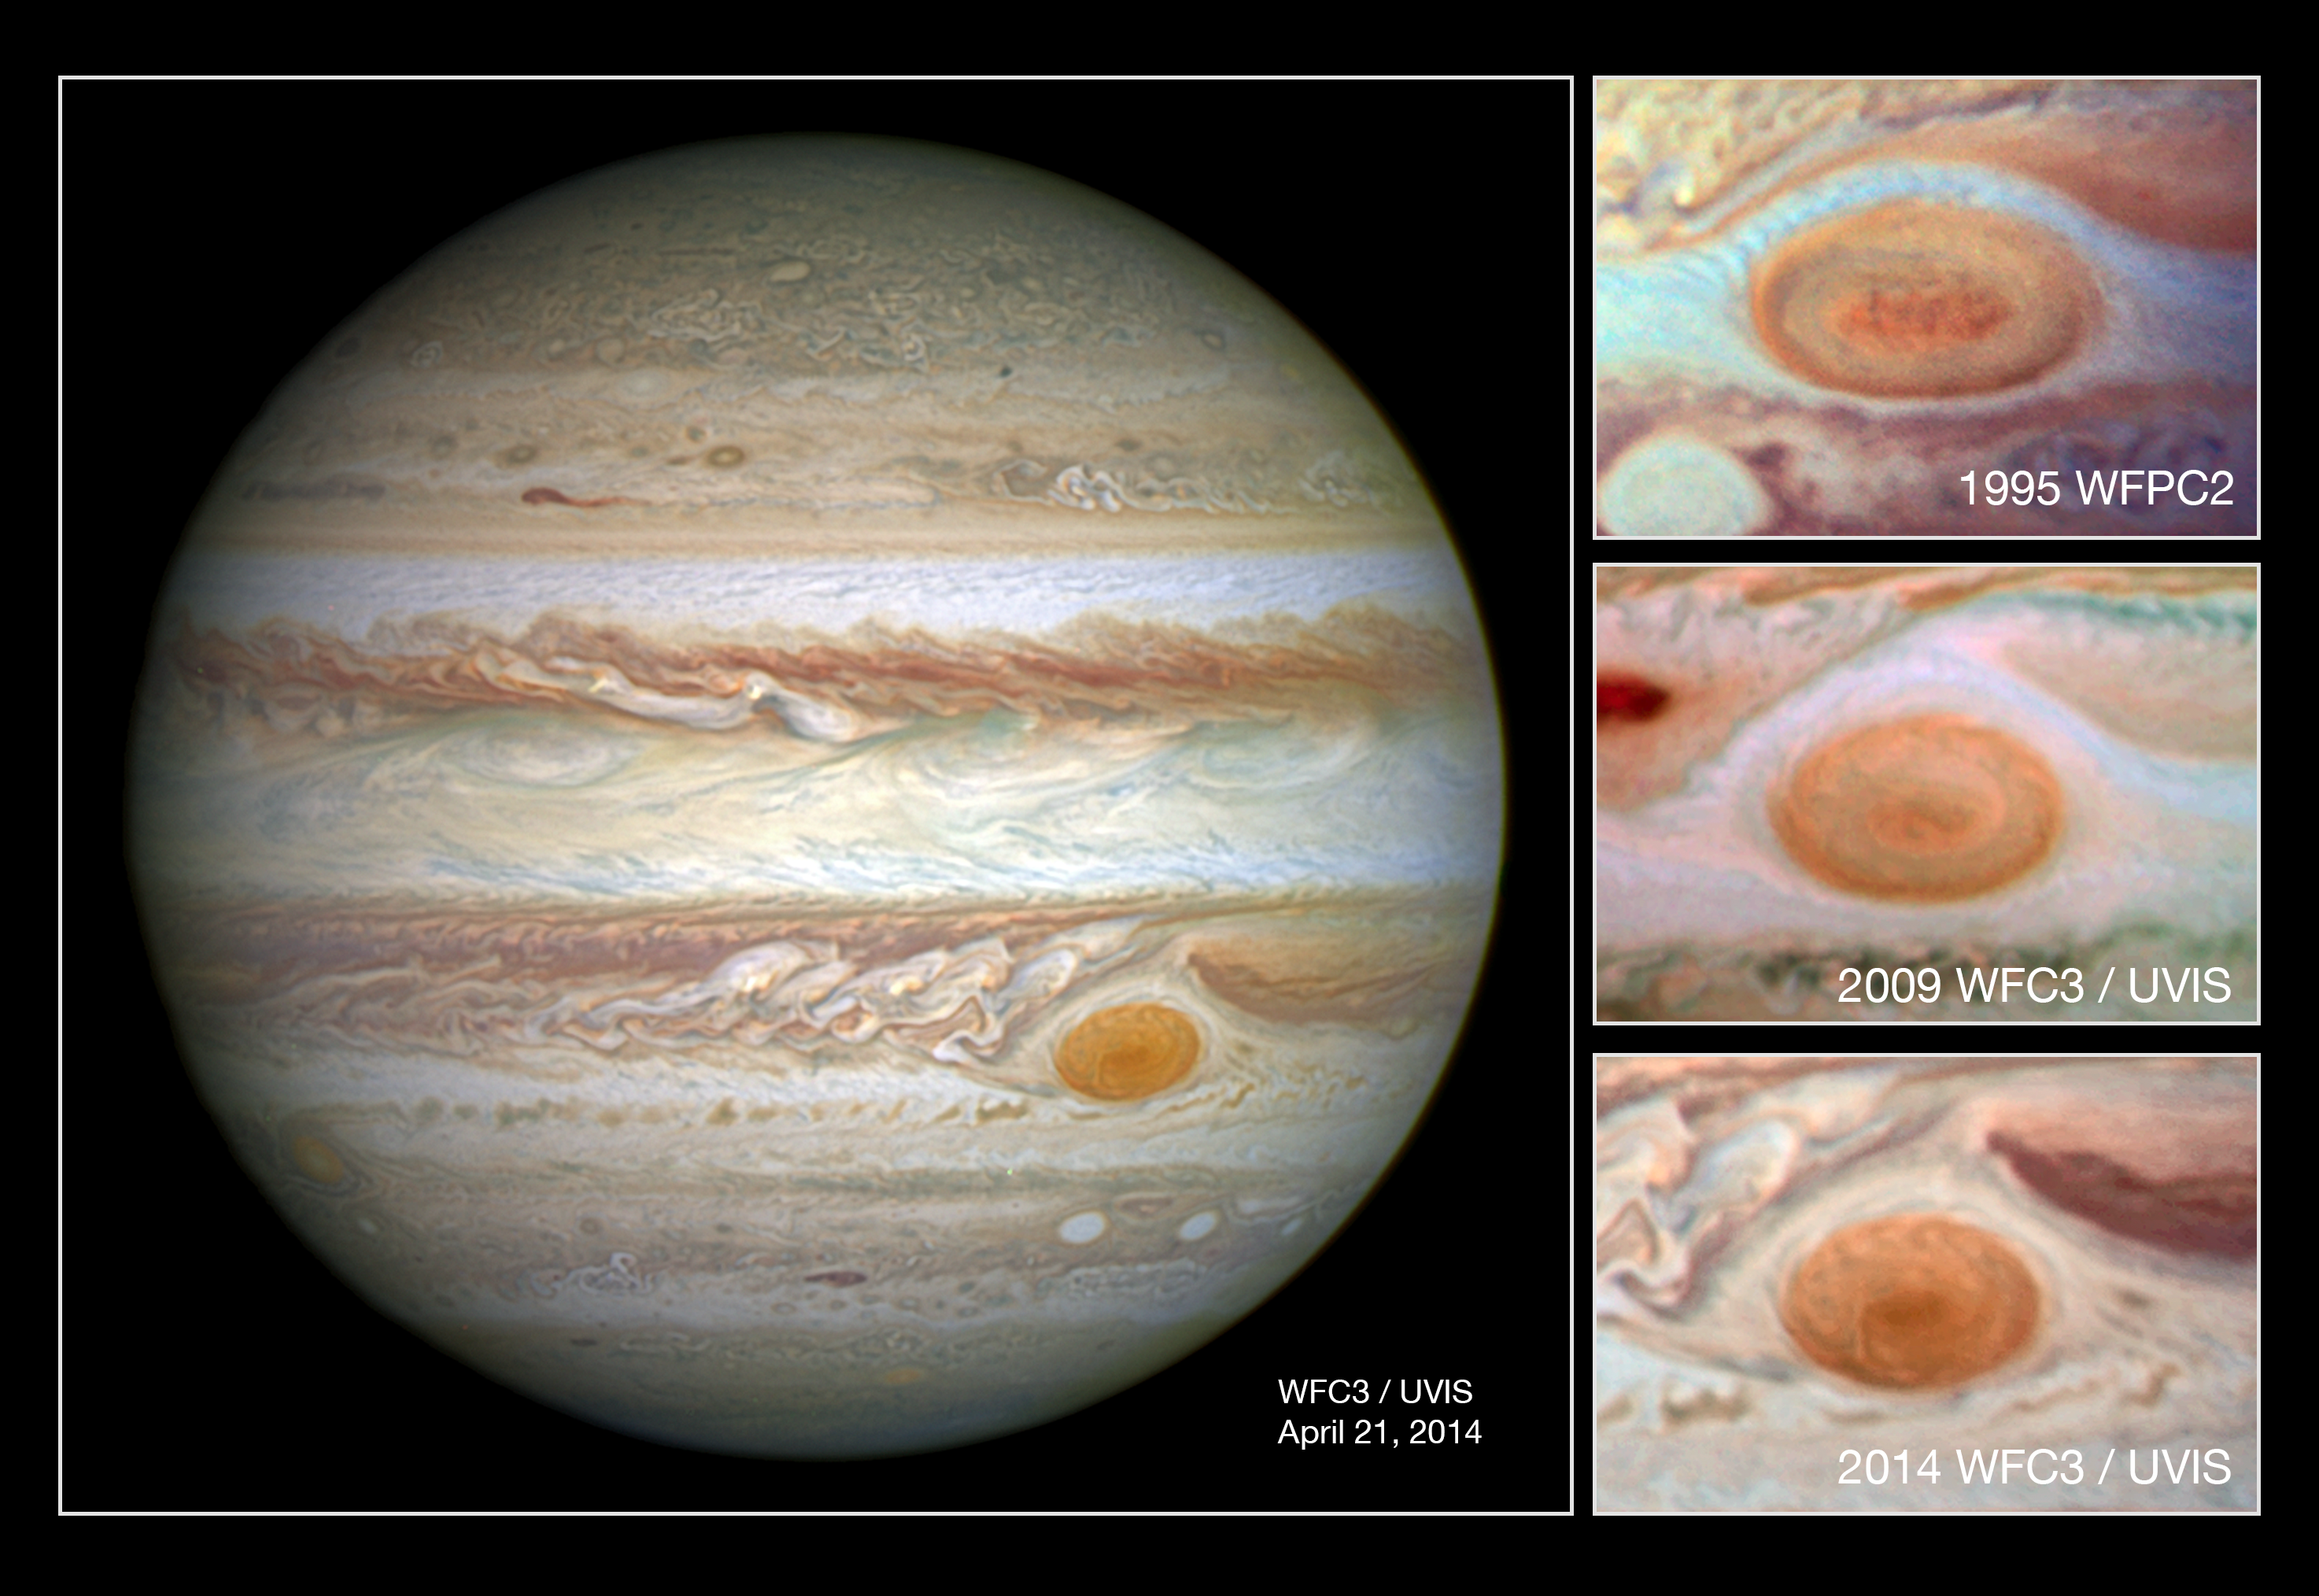

Jupiter with comparison images of the Great Red Spot from 1995, 2009 and 2014

In this comparison image the photo at the top was taken by Hubble's Wide Field Planetary Camera 2 in 1995 and shows the spot at a diameter of just under 21 000km; the second down shows a 2009 WFC3 photo of the spot at a diameter of just under 18 000km; and the lowest shows the newest image from WFC3 taken in 2014 with the spot at its smallest yet, with diameter of just 16 000km.

Credit: NASA, ESA, and A. Simon (Goddard Space Flight Center) Science Credit: A. Simon (Goddard Space Flight Center), G. Orton (Jet Propulsion Laboratory), J. Rogers (University of Cambridge, UK), and M. Wong and I. de Pater (University of California, Berkeley) Acknowledgment: C. Go, H. Hammel (SSI and AURA) and R. Beebe (NMSU)